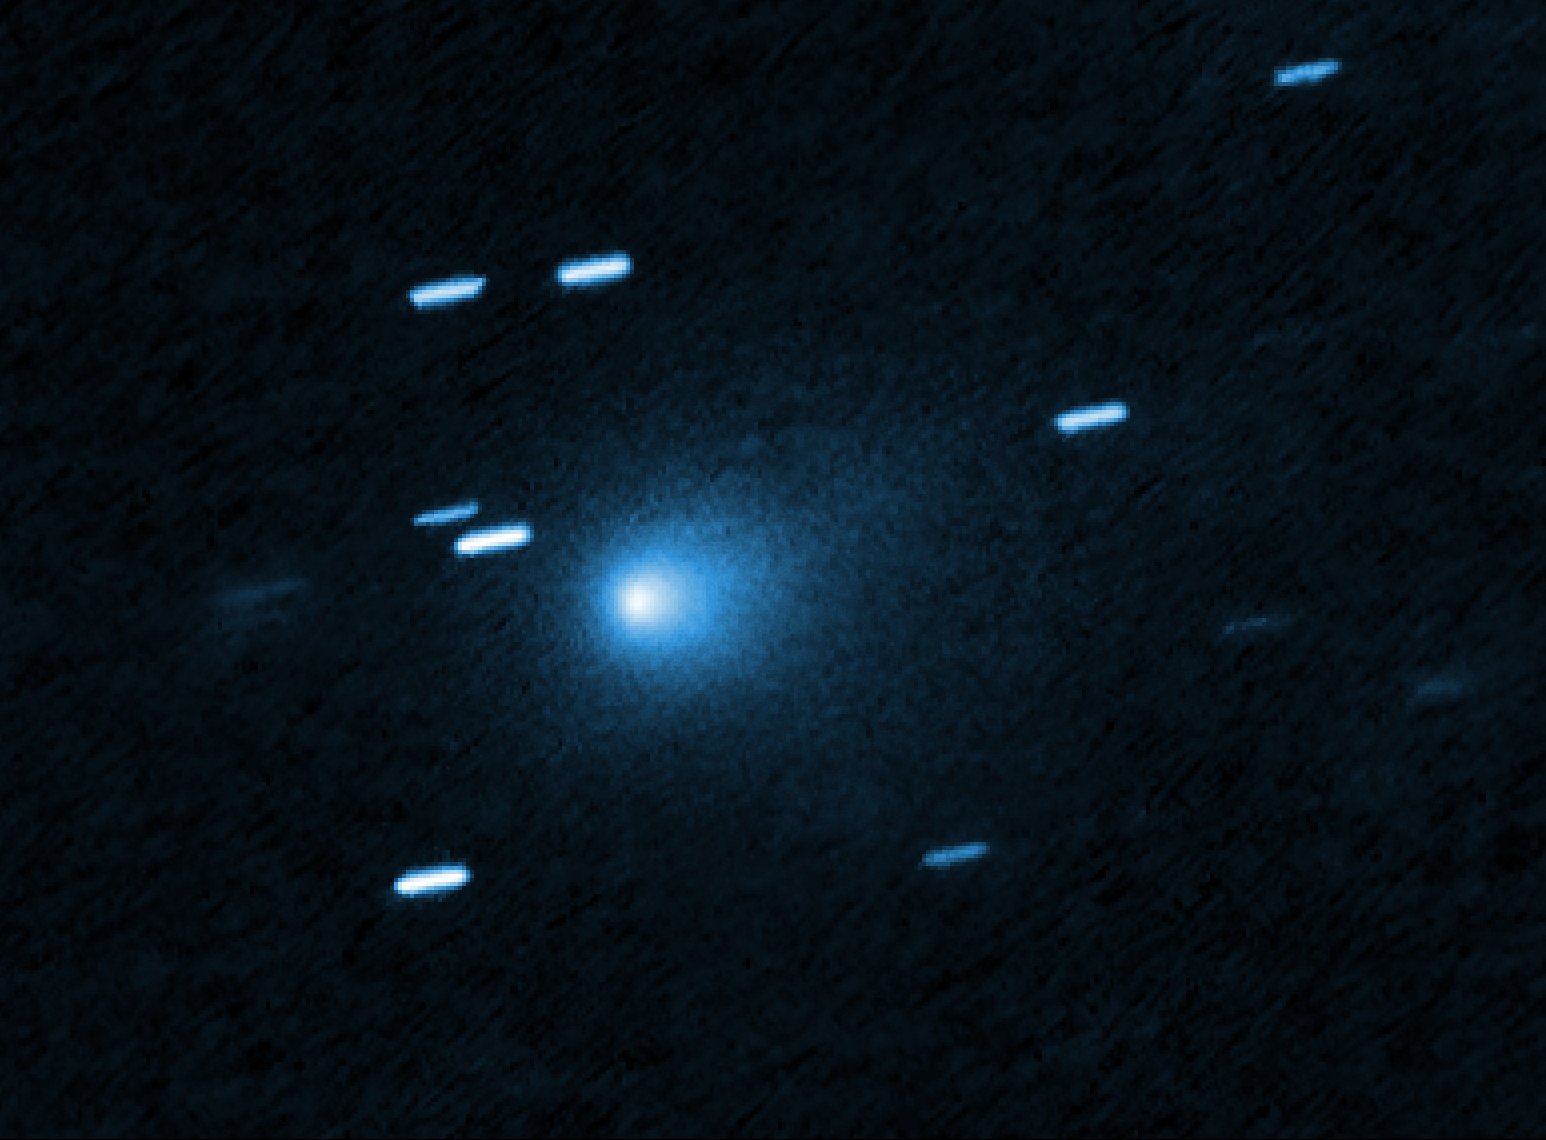

3I/ATLAS

This is a Hubble Space telescope image of the interstellar comet 3I/ATLAS. Hubble photographed the comet on 21 July 21 2025, when the comet was 365 million kilometres from Earth. Hubble shows that the comet has a teardrop-shaped cocoon of dust coming off its solid, icy nucleus. Because Hubble was tracking the comet moving along a hyperbolic trajectory, the stationary background stars are streaked in the exposure.

Credit: NASA, ESA, D. Jewitt (UCLA); Image Processing: J. DePasquale (STScI)